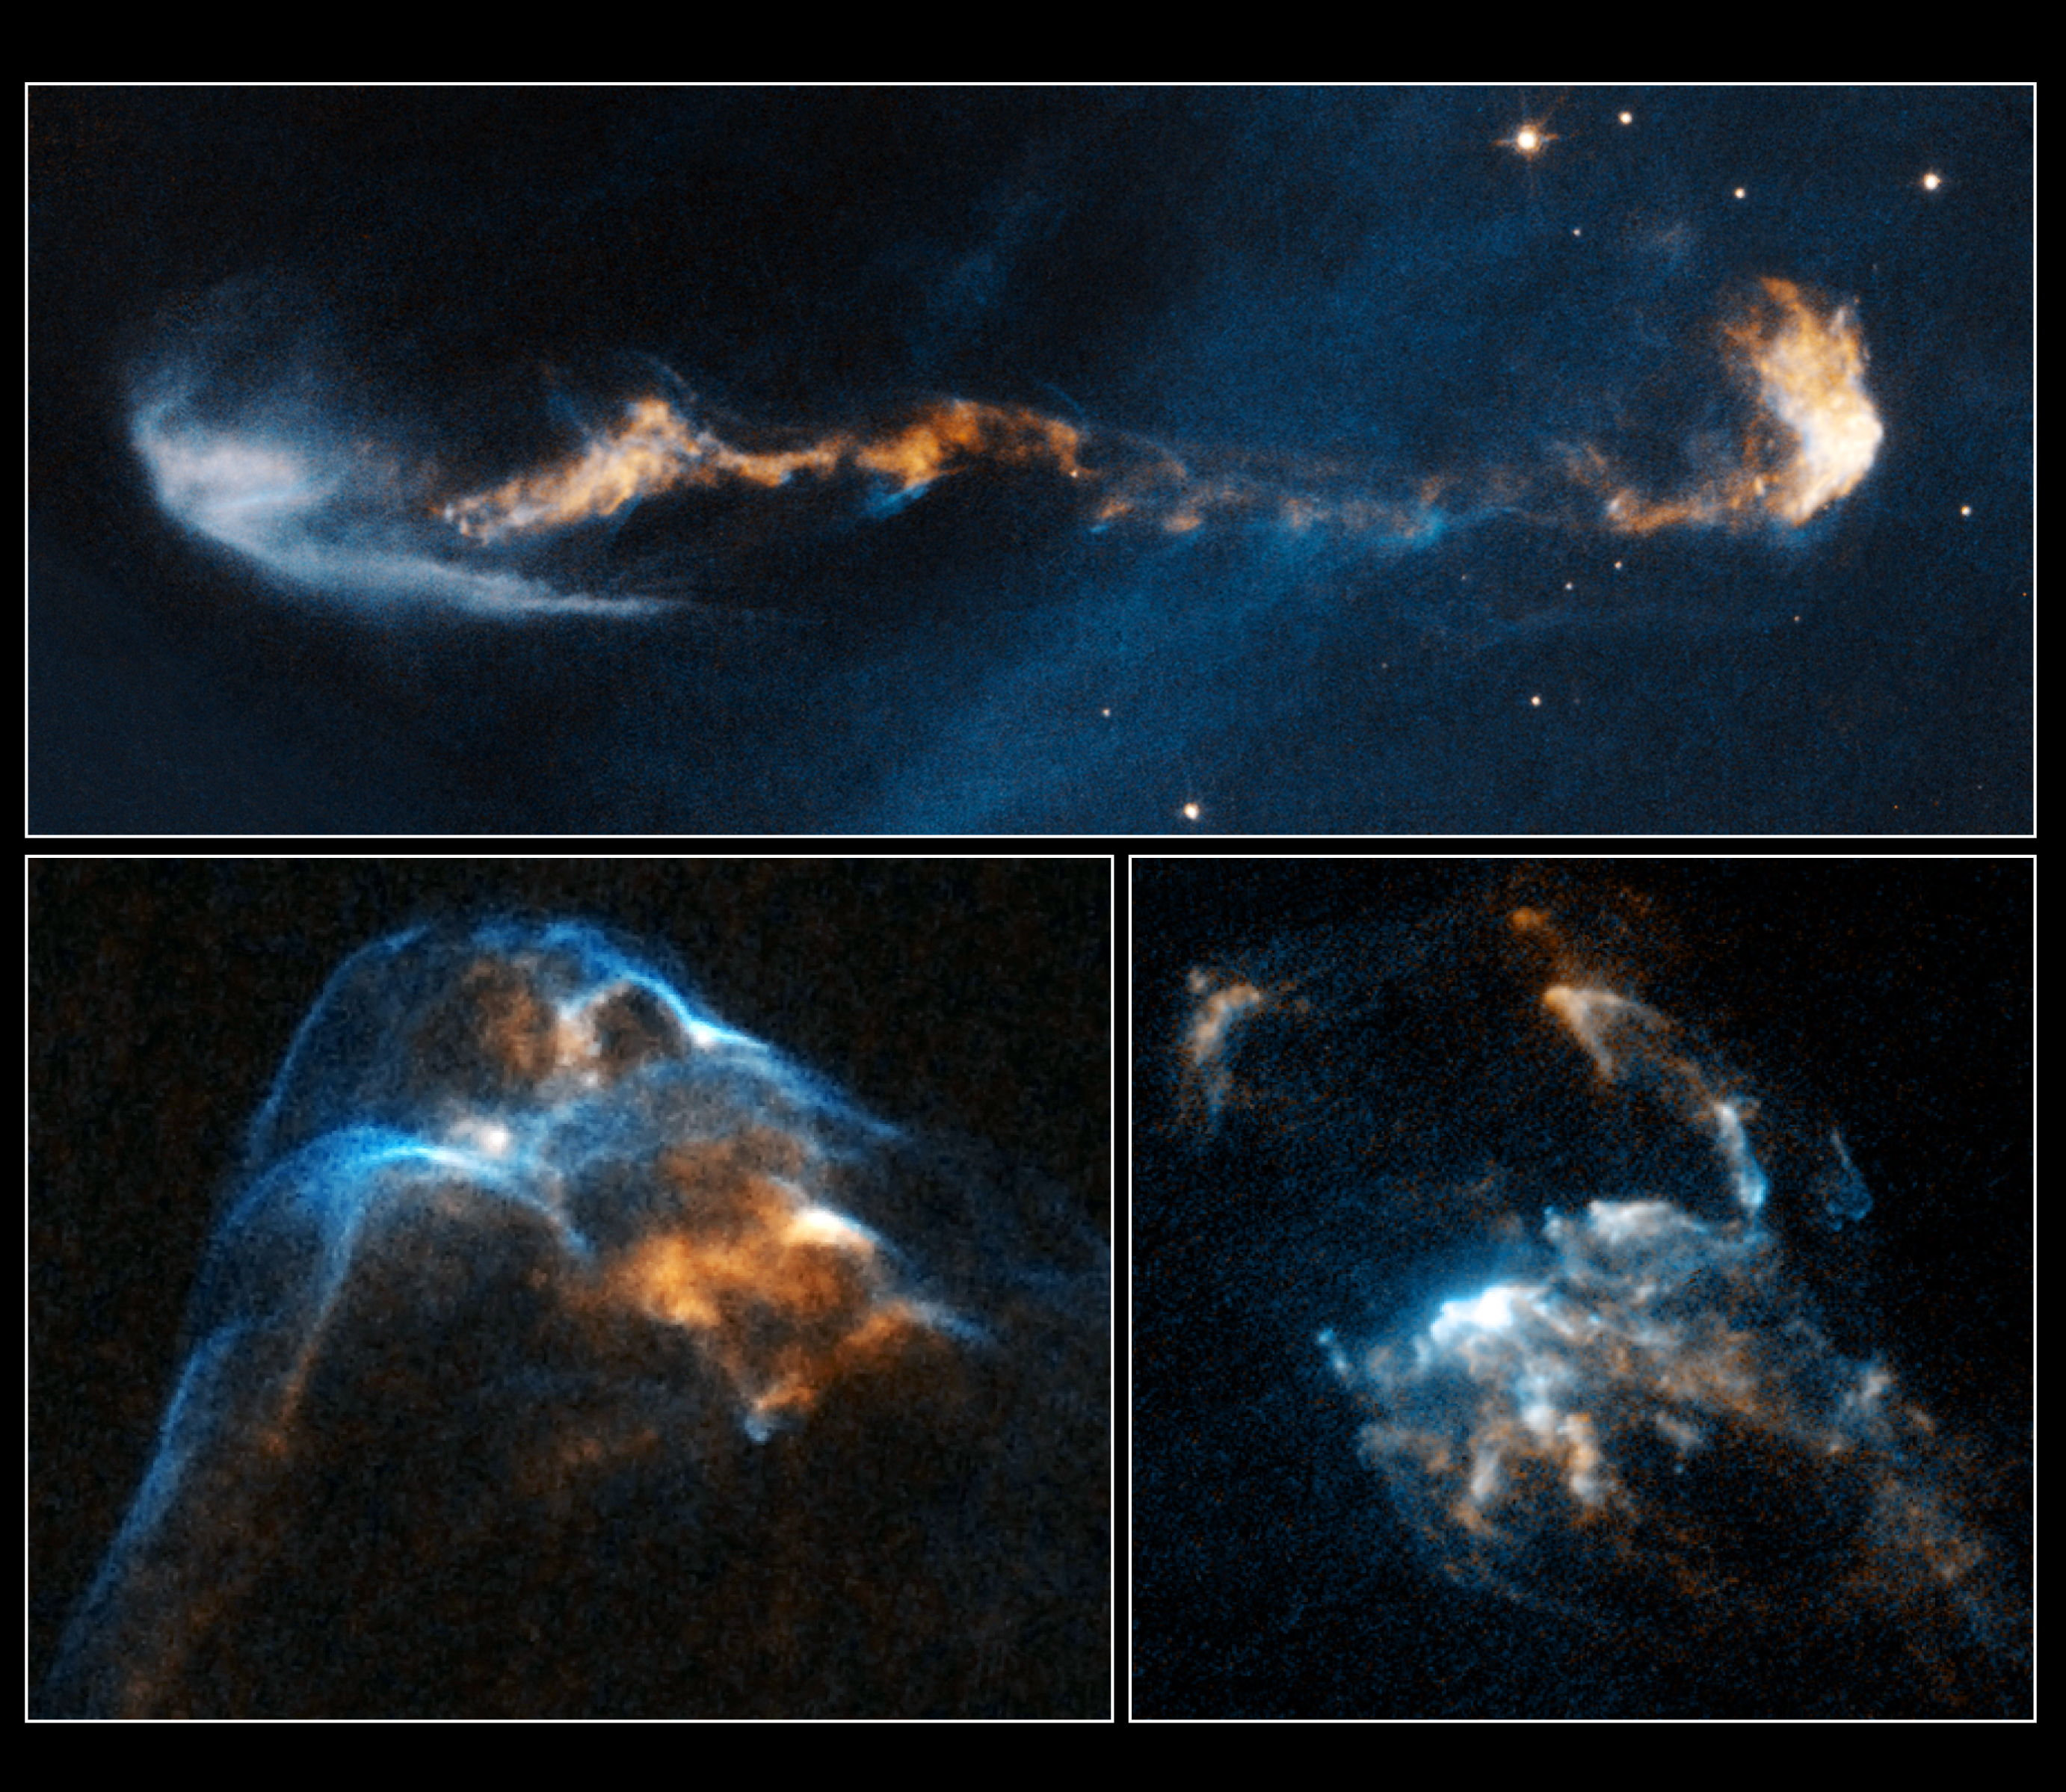

Stellar jets HH 47, HH 34 and HH 2

The glowing, clumpy streams of material shown in these NASA/ESA Hubble Space Telescope images are the signposts of star birth.

Ejected episodically by young stars like cannon salvos, the blobby material zips along at more than 700 000 kilometres per hour. The speedy jets are confined to narrow beams by the powerful stellar magnetic field. Called Herbig-Haro or HH objects, these outflows have a bumpy ride through space.

When fast-moving blobs collide with slower-moving gas, bow shocks arise as the material heats up. Bow shocks are glowing waves of material similar to waves produced by the bow of a ship ploughing through water.

In HH 2, at lower right, several bow shocks can be seen where several fast-moving clumps have bunched up like cars in a traffic jam. In HH 34, at lower left, a grouping of merged bow shocks reveals regions that brighten and fade over time as the heated material cools where the shocks intersect.

In HH 47, at top, the blobs of material look like a string of cars on a crowded motorway, which ends in a chain-reaction accident. The smash up creates the bow shock, left.

These images are part of a series of time-lapse movies astronomers have made showing the outflows’ motion over time. The movies were stitched together from images taken over a 14-year period by Hubble’s Wide Field Planetary Camera 2. Hubble followed the jets over three epochs: HH 2 from 1994, 1997, and 2007; HH 34 from 1994, 1998, and 2007; and HH 47 from 1994, 1999, and 2008.

The outflows are roughly 1350 light-years from Earth. HH 34 and HH 2 reside near the Orion Nebula, in the northern sky. HH 47 is located in the southern constellation of Vela.

Credit: NASA, ESA, and P. Hartigan (Rice University)